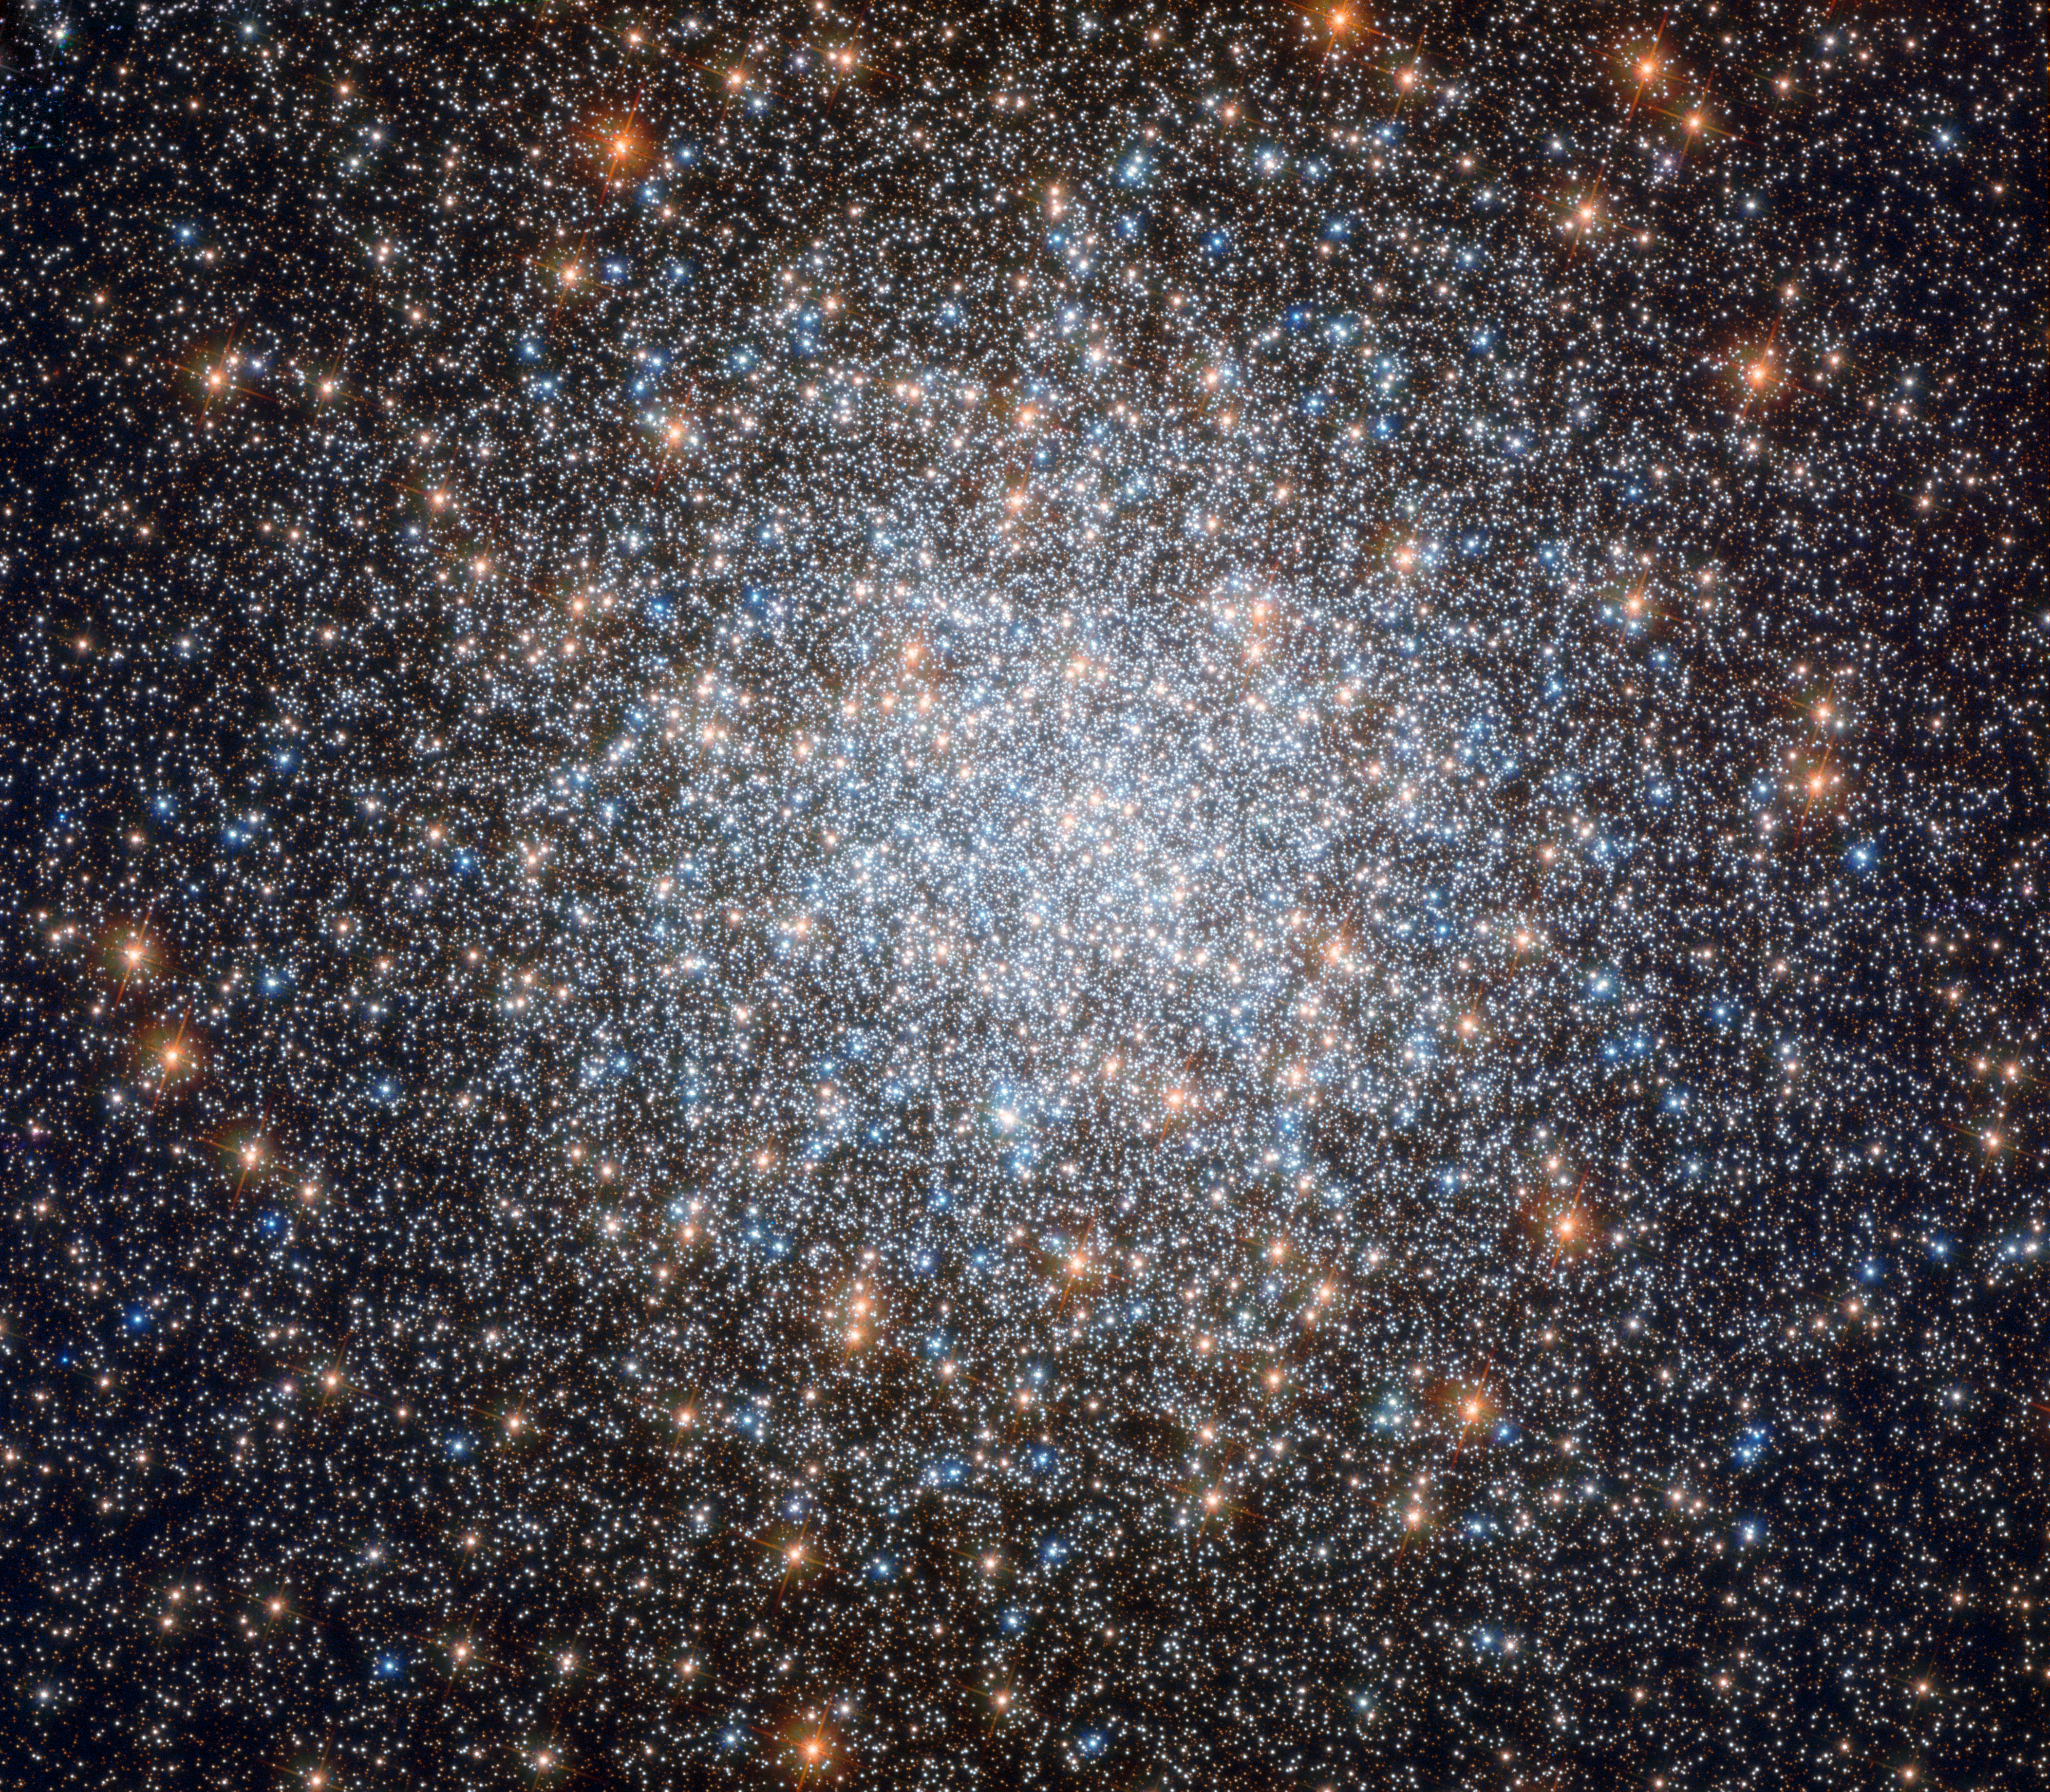

Blue rejuvenation

Globular clusters are inherently beautiful objects, but the subject of this NASA/ESA Hubble Space Telescope image, Messier 3, is commonly acknowledged to be one of the most beautiful of them all.

Containing an incredible half a million stars, this eight-billion-year-old cosmic bauble is one of the largest and brightest globular clusters ever discovered. However, what makes Messier 3 extra special is its unusually large population of variable stars — stars that fluctuate in brightness over time. New variable stars continue to be discovered in this sparkling stellar nest to this day, but so far we know of 274, the highest number found in any globular cluster by far. At least 170 of these are of a special variety called RR Lyrae variables, which pulse with a period directly related to their intrinsic brightness. If astronomers know how bright a star truly is based on its mass and classification, and they know how bright it appears to be from our viewpoint here on Earth, they can thus work out its distance from us. For this reason, RR Lyrae stars are known as standard candles — objects of known luminosity whose distance and position can be used to help us understand more about vast celestial distances and the scale of the cosmos.

Messier 3 also contains a relatively high number of so-called blue stragglers, which are shown quite clearly in this Hubble image. These are blue main sequence stars that appear to be young because they are bluer and more luminous than other stars in the cluster. As all stars in globular clusters are believed to have formed together and thus be roughly the same age. Only a difference in mass can give these stars a different colour: a red, old star can appear bluer when it acquires more mass, for instance stripping it from a nearby star. The extra mass changes it into a bluer star, which makes us think it is younger than it really is.

Credit: ESA/Hubble & NASA, G. Piotto et al.